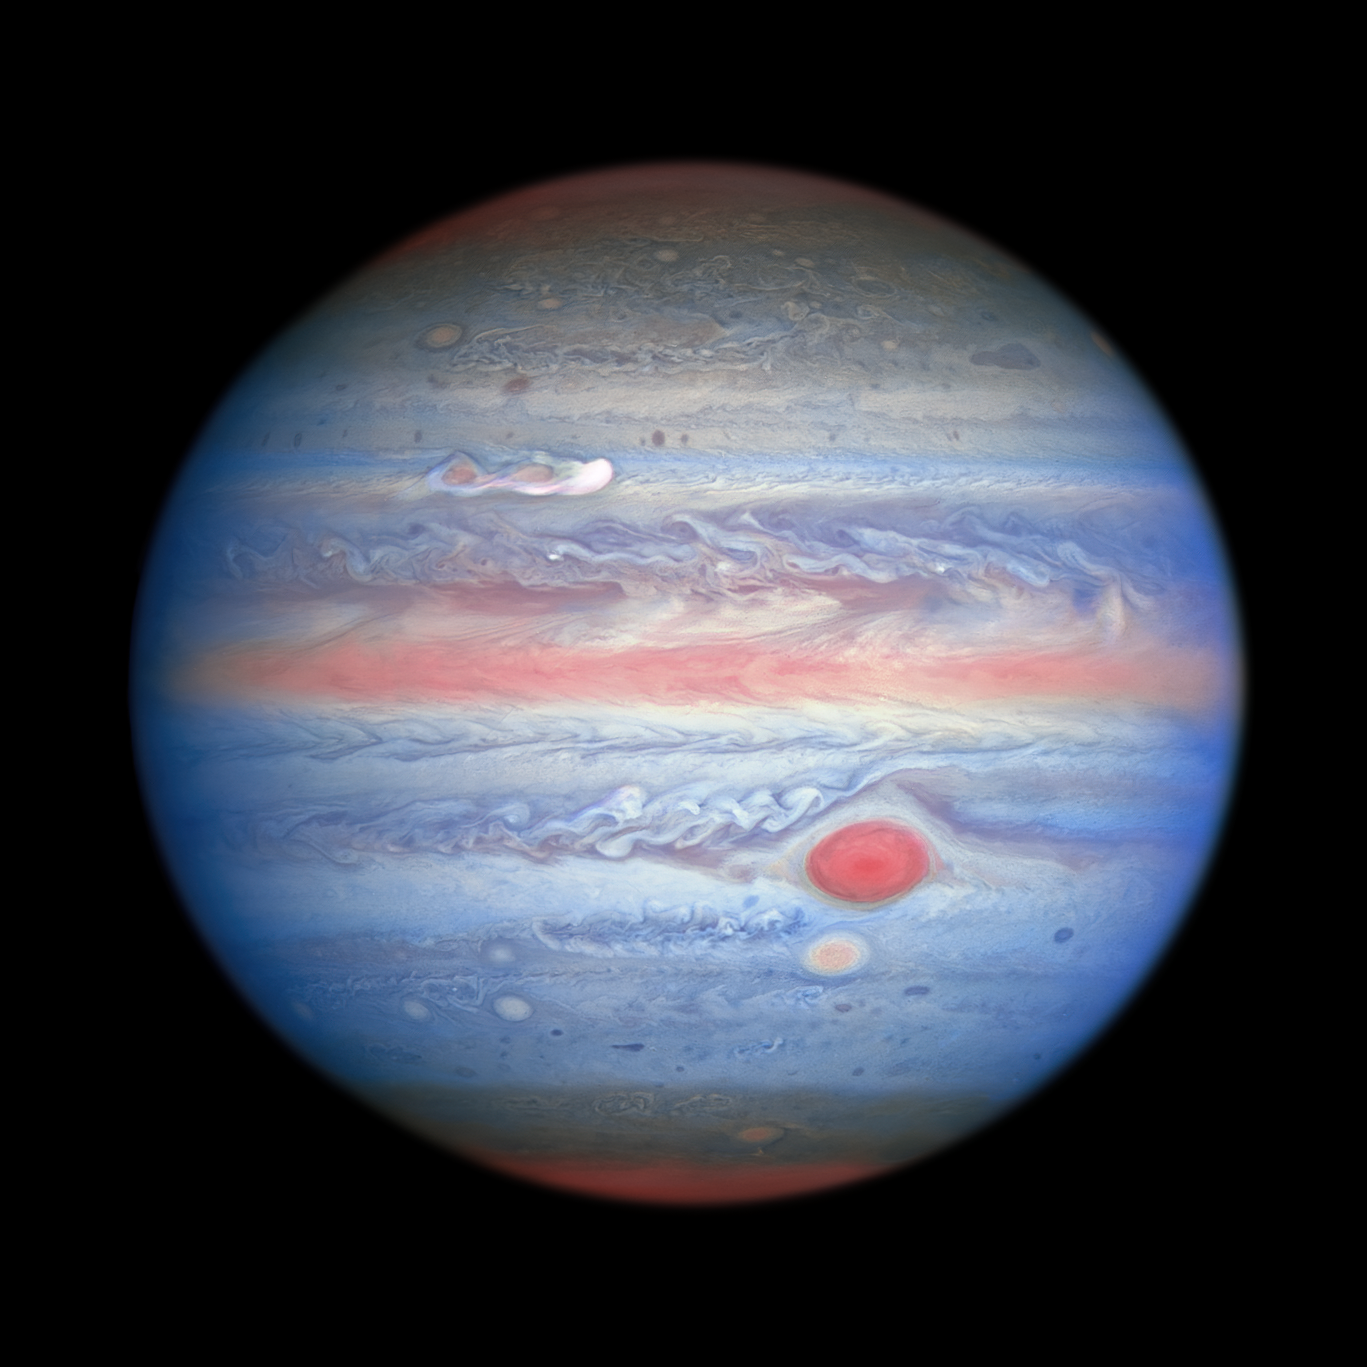

Hubble’s New Rainbow View of Jupiter

A multiwavelength observation in ultraviolet/visible/near-infrared light of Jupiter obtained by the NASA/ESA Hubble Space Telescope on 25 August 2020 is giving researchers an entirely new view of the giant planet. Hubble’s near-infrared imaging, combined with ultraviolet views, provides a unique panchromatic look that offers insights into the altitude and distribution of the planet’s haze and particles. This complements Hubble’s visible-light pictures that show the ever-changing cloud patterns.

In this photo, the parts of Jupiter’s atmosphere that are at higher altitude, especially over the poles, look red as a result of atmospheric particles absorbing ultraviolet light. Conversely, the blue-hued areas represent the ultraviolet light being reflected off the planet.

A new storm at upper left, which erupted on 18 August 2020, is grabbing the attention of scientists in this multiwavelength view. The “clumps” trailing the white plume appear to be absorbing ultraviolet light, similar to the centre of the Great Red Spot, and Red Spot Jr. directly below it. This provides researchers with more evidence that this storm may last longer on Jupiter than most storms.

Credit: NASA, ESA, A. Simon (Goddard Space Flight Center), and M. H. Wong (University of California, Berkeley) and the OPAL team.